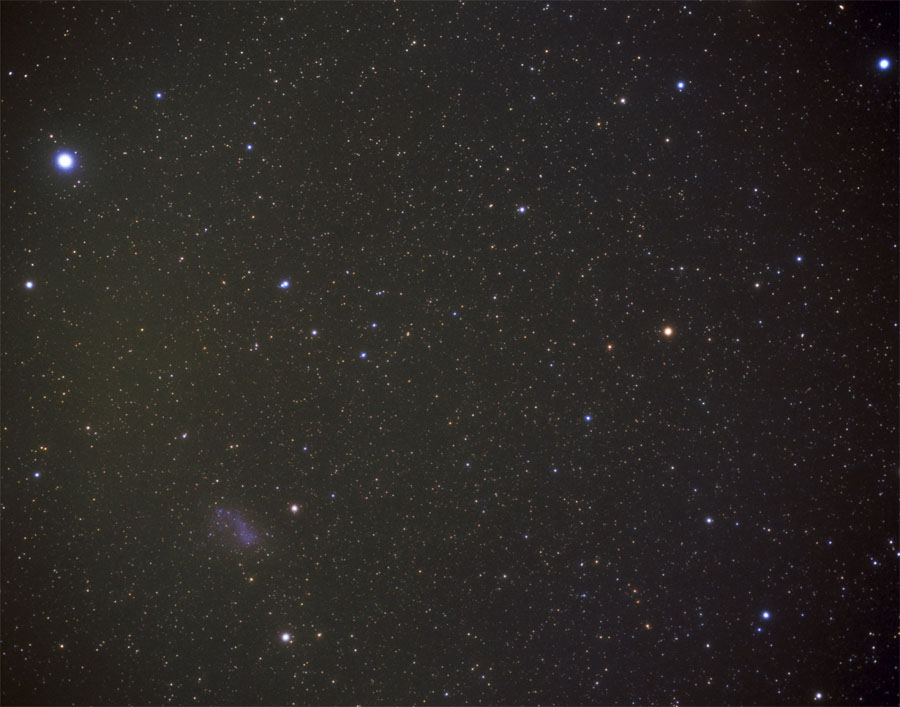

Location of the HDF South on the Sky (ground-based image)

Hidden in this image is the location of the Hubble Deep Field South. This area, the subject of Hubble's gaze, is a 12- billion-light-year-long corridor loaded with a dazzling assortment of thousands of never-before-seen galaxies. The same image with a marked location can be found here.

Credit: Akira Fujii, courtesy Sky and Telescope Magazine